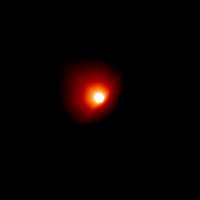

Comet Linear (July 5, 2000)

The nucleus cannot be seen in these images because it is about a mile or so across, which is too small for the Hubble telescope to see.

Credit: NASA/ESA, H. Weaver and P. Feldman (Johns Hopkins University), M. A'Hearn (University of Maryland), C. Arpigny (Liège University), M. Combi (University of Michigan), M. Festou (Observatoire Midi-Pyrénées), and G.-P. Tozzi (Arcetri Observatory)